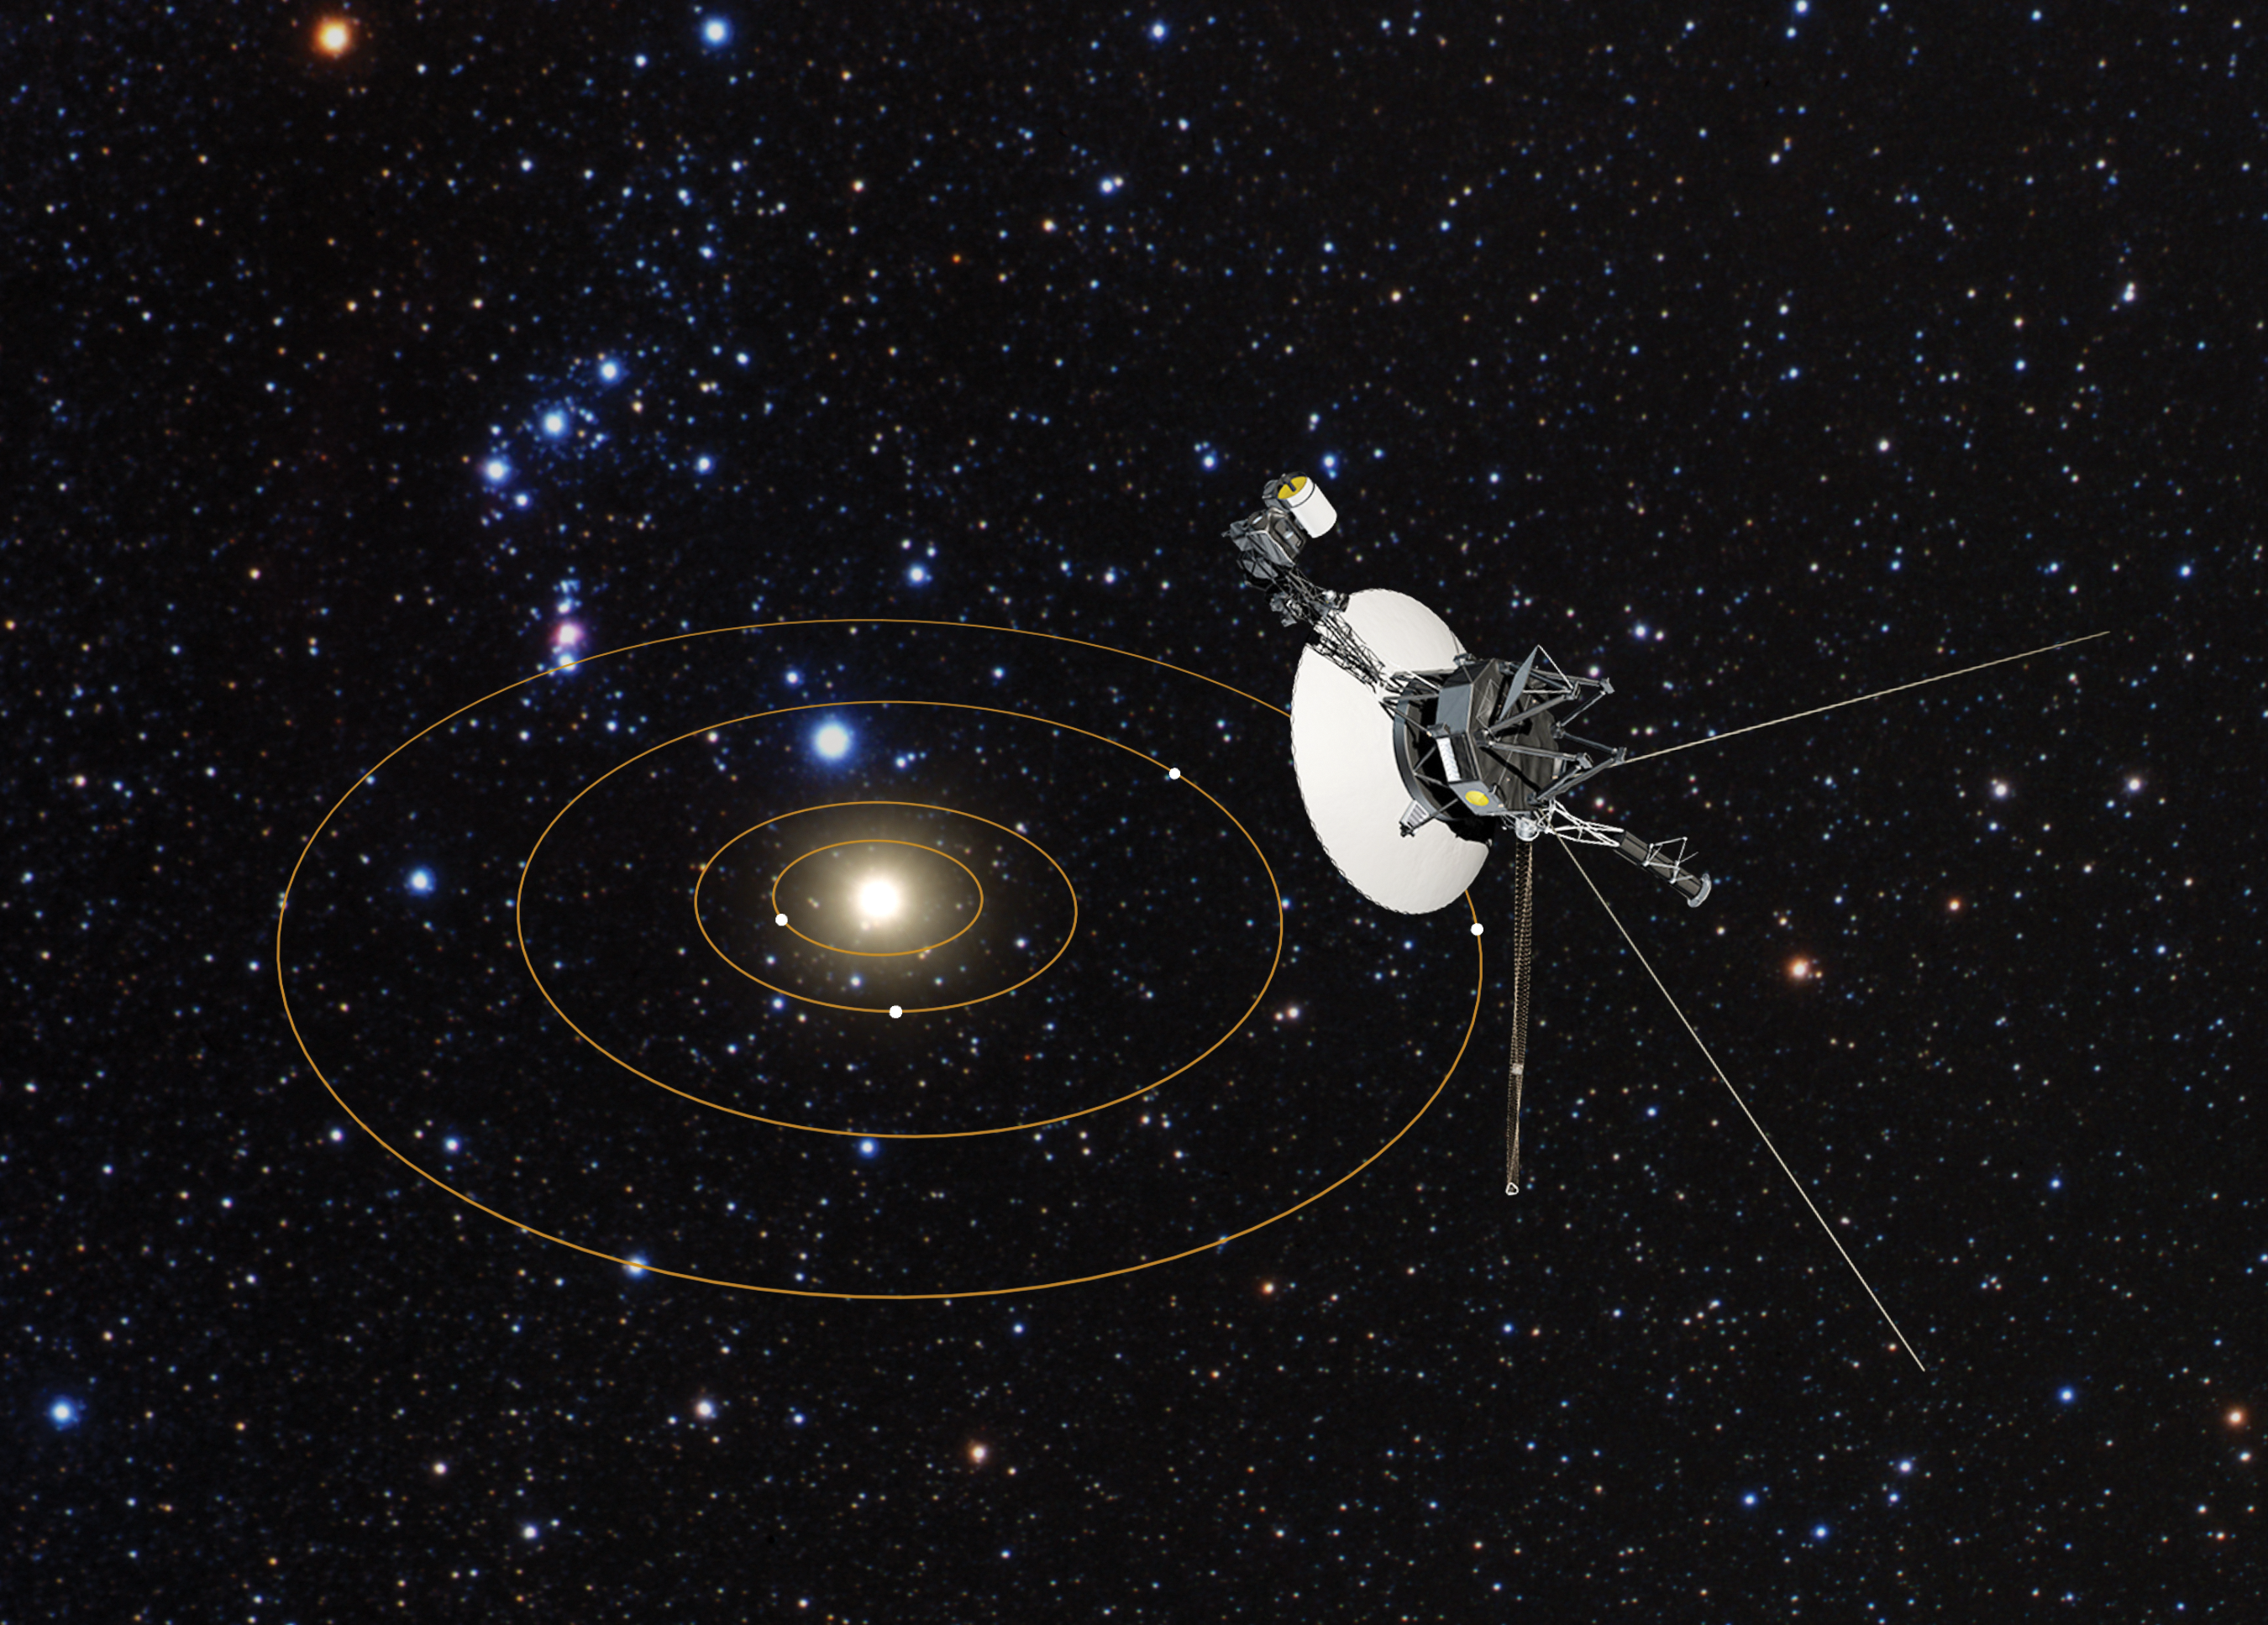

Voyager 1's view of Solar System (artist's impression)

In 1977, NASA's Voyager 1 and 2 spacecraft began their pioneering journey across the Solar System to visit the giant outer planets. Now, the Voyagers are hurtling through unexplored territory on their road trip beyond our Solar System. Along the way, they are measuring the interstellar medium, the mysterious environment between stars that is filled with the debris from long-dead stars. The NASA/ESA Hubble Space Telescope is providing the roadmap, by measuring the material along the probes' trajectories as they move through space. Hubble finds a rich, complex interstellar ecology, containing multiple clouds of hydrogen, laced with other elements. Hubble data, combined with the Voyagers, have also provided new insights into how our sun travels through interstellar space.

Credit: NASA, ESA, and G. Bacon (STScI)